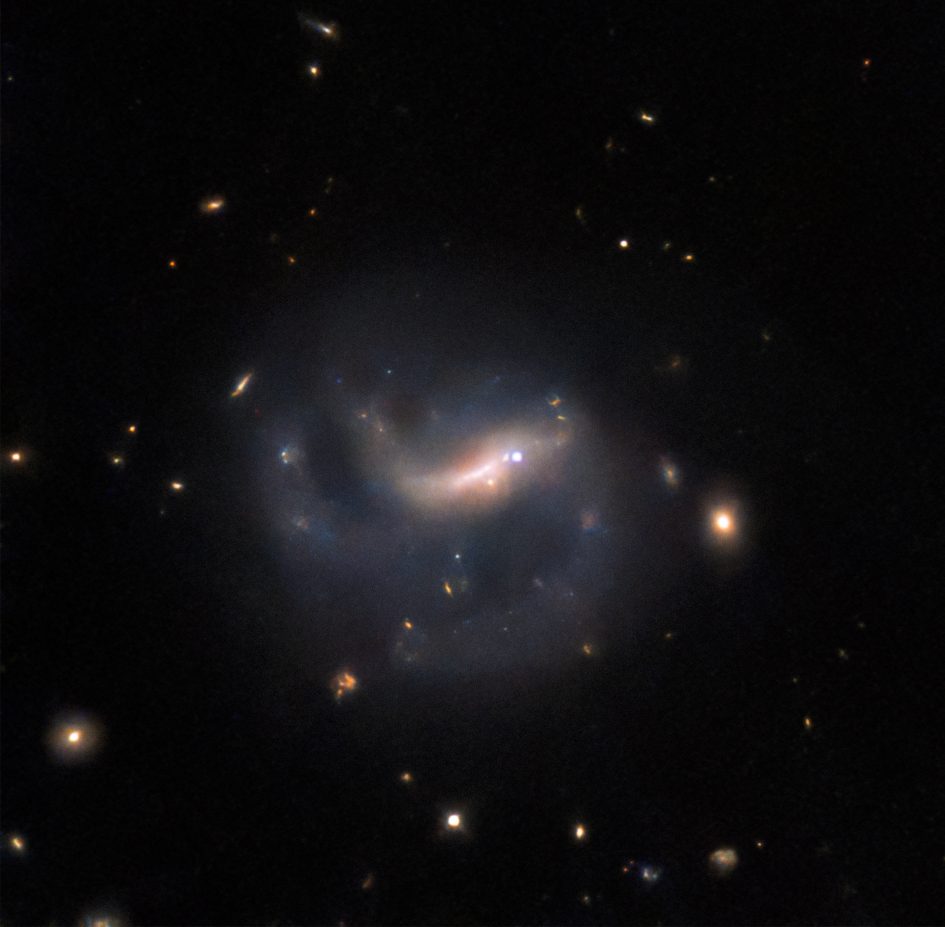

A supernova spotlight

This Hubble Picture of the Week features the galaxy LEDA 857074, located in the constellation Eridanus. LEDA 857074 is a barred spiral galaxy, with partially broken spiral arms. It also has a particularly bright spot right in its bar: this is a supernova snapped by Hubble, named SN 2022ADQZ, and quite relevant to this Picture of the Week.

The NASA/ESA Hubble Space Telescope has observed a vast range of celestial objects, from galaxies, to nebulae, to star clusters, to planets in the Solar System and beyond. Observing programmes usually seek to gather data so that astronomers can answer a specific question. Naturally, this means most scheduled observations target an object that astronomers have already researched. Some are famous, like the Crab Nebula or the globular cluster Omega Centauri; others might not be so well known to the public, but still be featured in hundreds of scientific papers, such as the Spider Galaxy or NGC 4753. Not so with this galaxy: LEDA 857074 is named in fewer than five papers, one of which is the Lyon-Meudon Extragalactic Database itself. Virtually no data have been recorded about it, other than its position: since its discovery, it simply hasn’t been studied. So how did it attract the gaze of the legendary Hubble?

The supernova is the answer — SN 2022ADQZ was detected by an automated survey in late 2022, and led to Hubble being pointed at its host galaxy, LEDA 857074, in early 2023. Astronomers have catalogued millions of galaxies, so while today tens of thousands of supernovae are detected annually, the chance that one is spotted in any particular galaxy is slim. We also do not know how actively LEDA 857074 is forming stars, and therefore how often it might host a supernova. This galaxy is therefore an unlikely and lucky target of Hubble, thanks to this supernova shining a spotlight on it! It now joins the ranks of many more famous celestial objects, with its own Hubble image.

Credit: ESA/Hubble & NASA, R. J. Foley